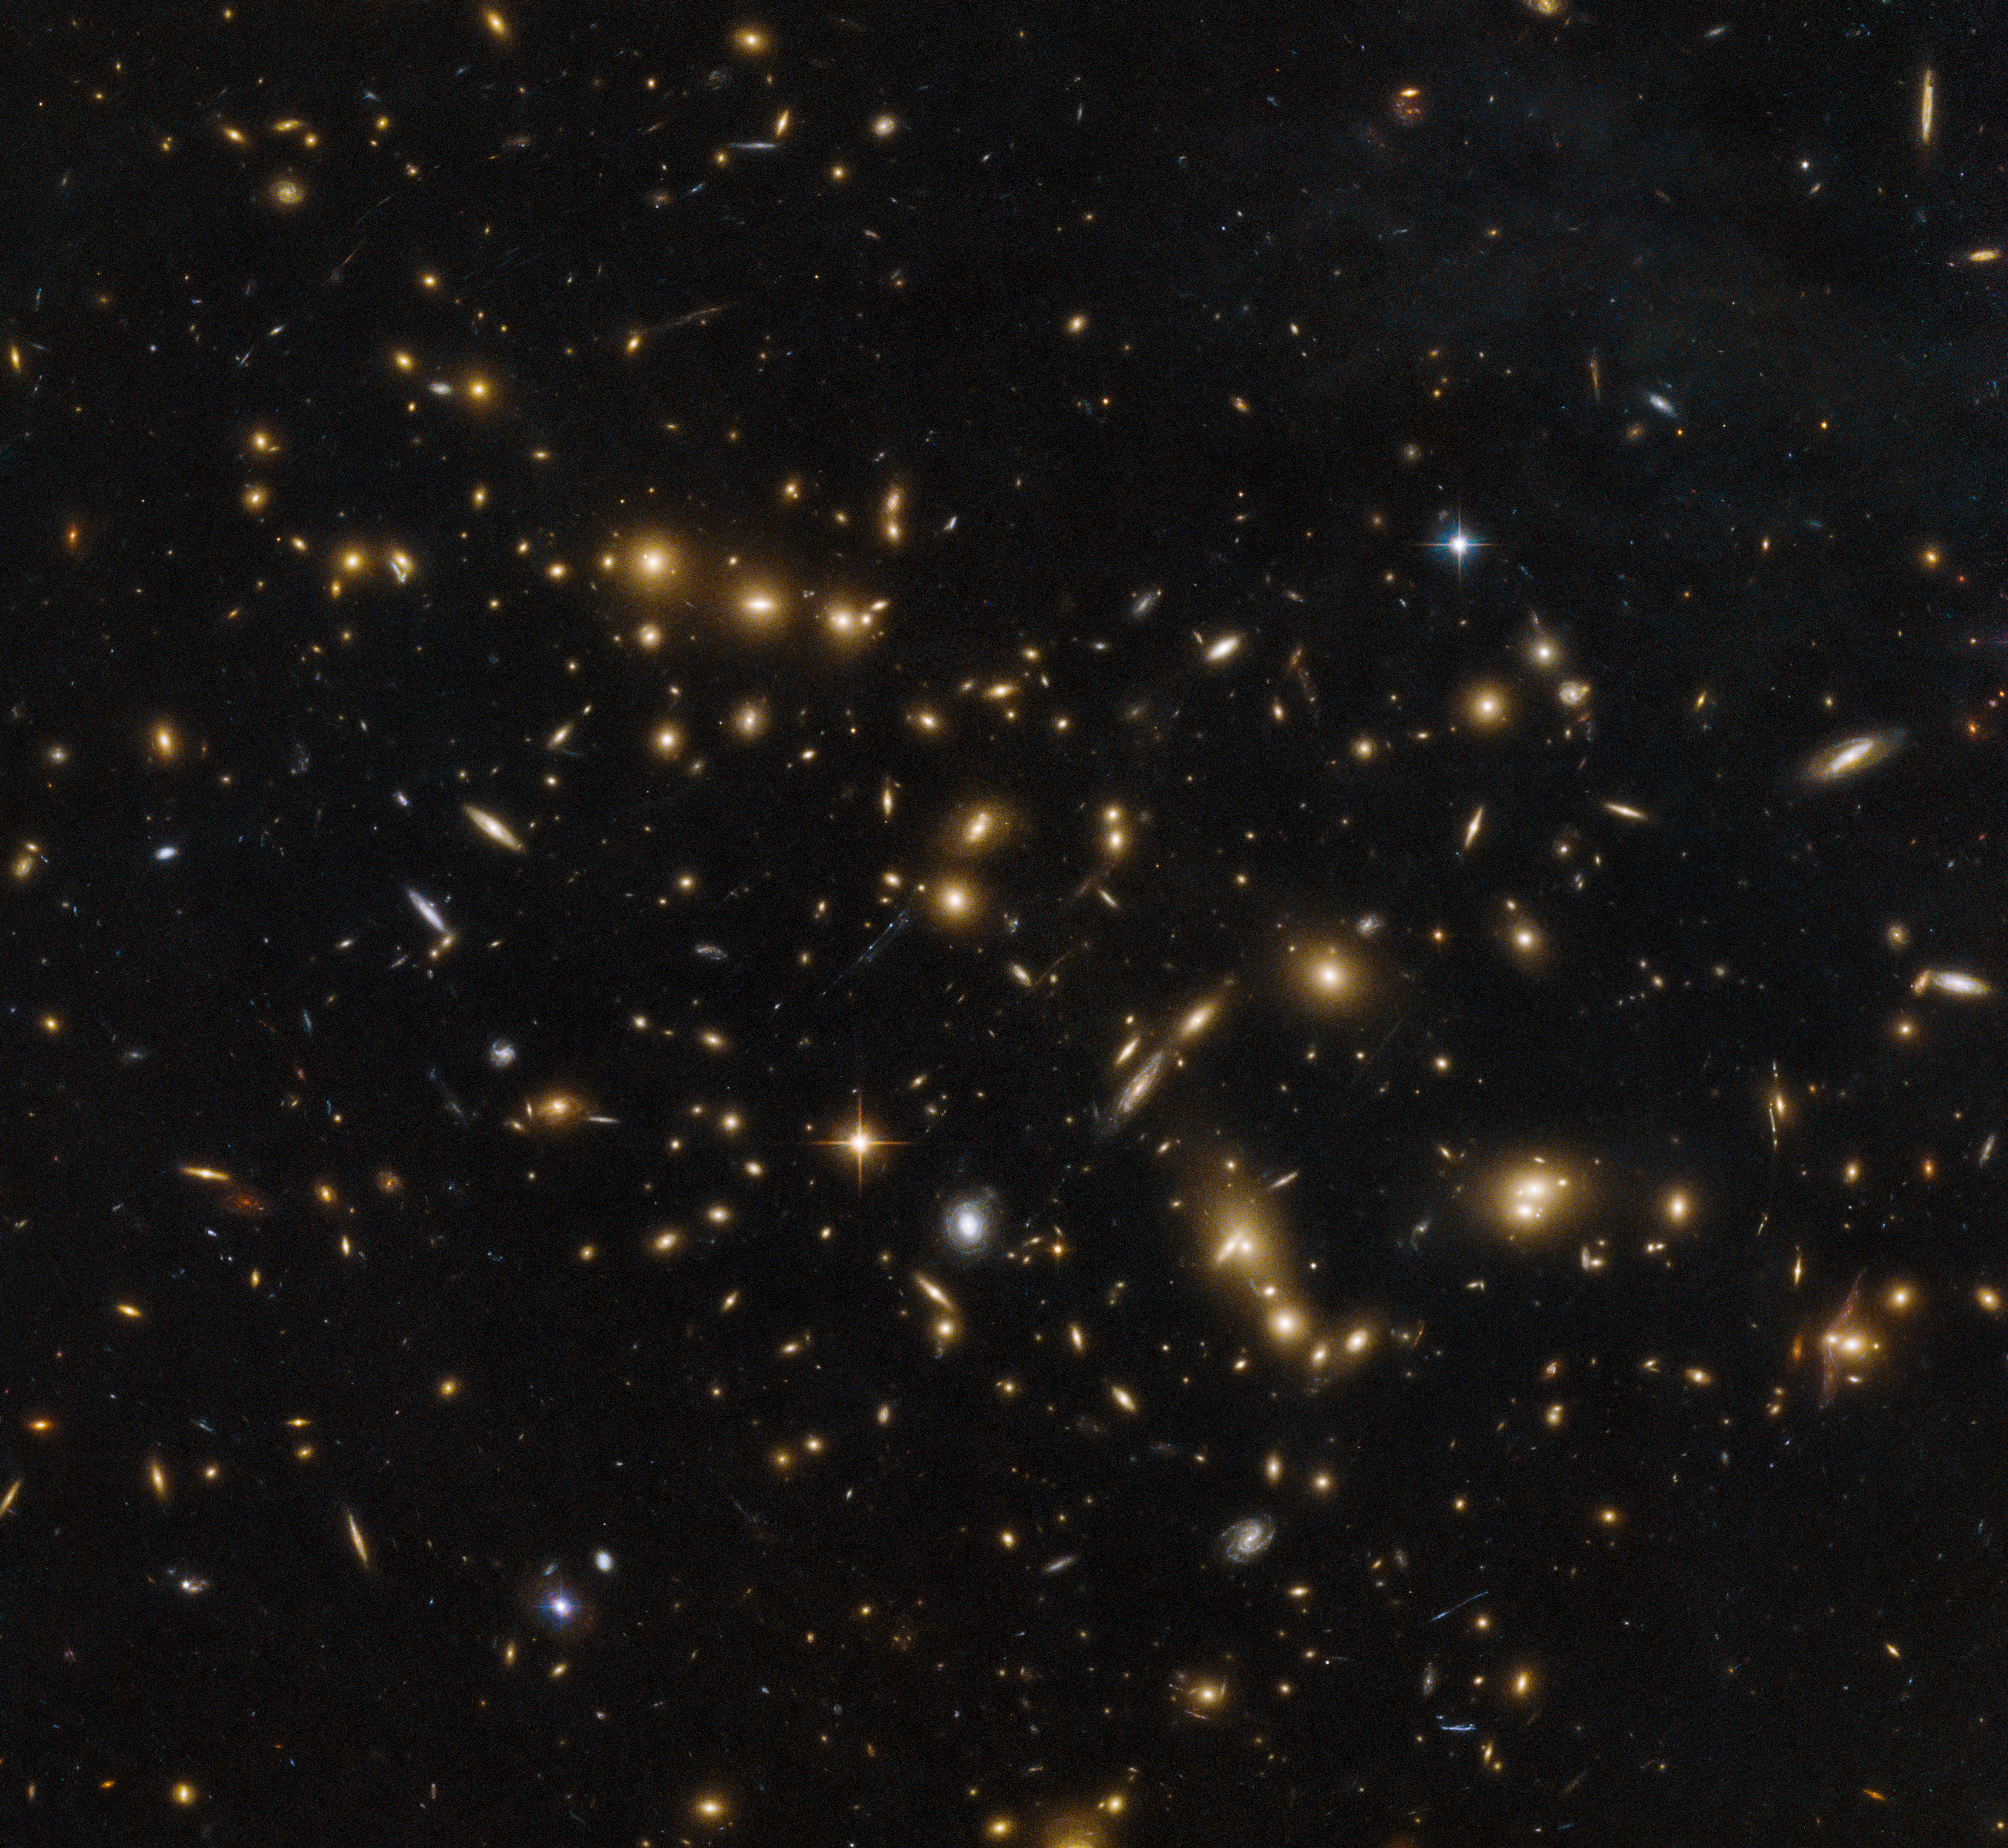

From toddlers to babies

In the darkness of the distant Universe, galaxies resemble glowing fireflies, flickering candles, charred embers floating up from a bonfire, light bulbs softly shining. This Picture of the Week, captured by the NASA/ESA Hubble Space Telescope, shows a massive group of galaxies bound together by gravity: a cluster named RXC J0032.1+1808.

This image was taken by Hubble’s Advanced Camera for Surveys and Wide-Field Camera 3 as part of an observing programme called RELICS (Reionization Lensing Cluster Survey). RELICS imaged 41 massive galaxy clusters with the aim of finding the brightest distant galaxies for the forthcoming NASA/ESA/CSA James Webb Space Telescope (JWST) to study.

Expected to launch in 2018, the JWST is designed to see in infrared wavelengths, which is exceedingly useful for observing distant objects. As a result of the expansion of the Universe, very distant objects are highly redshifted (their light is shifted towards the redder end of the spectrum) and so infrared telescopes are needed to study them. While Hubble currently has the ability to peer billions of years into the past to see “toddler” galaxies, the JWST will have the capability to study “baby” galaxies, the first galaxies that formed in the Universe.

Credit: ESA/Hubble & NASA, RELICS